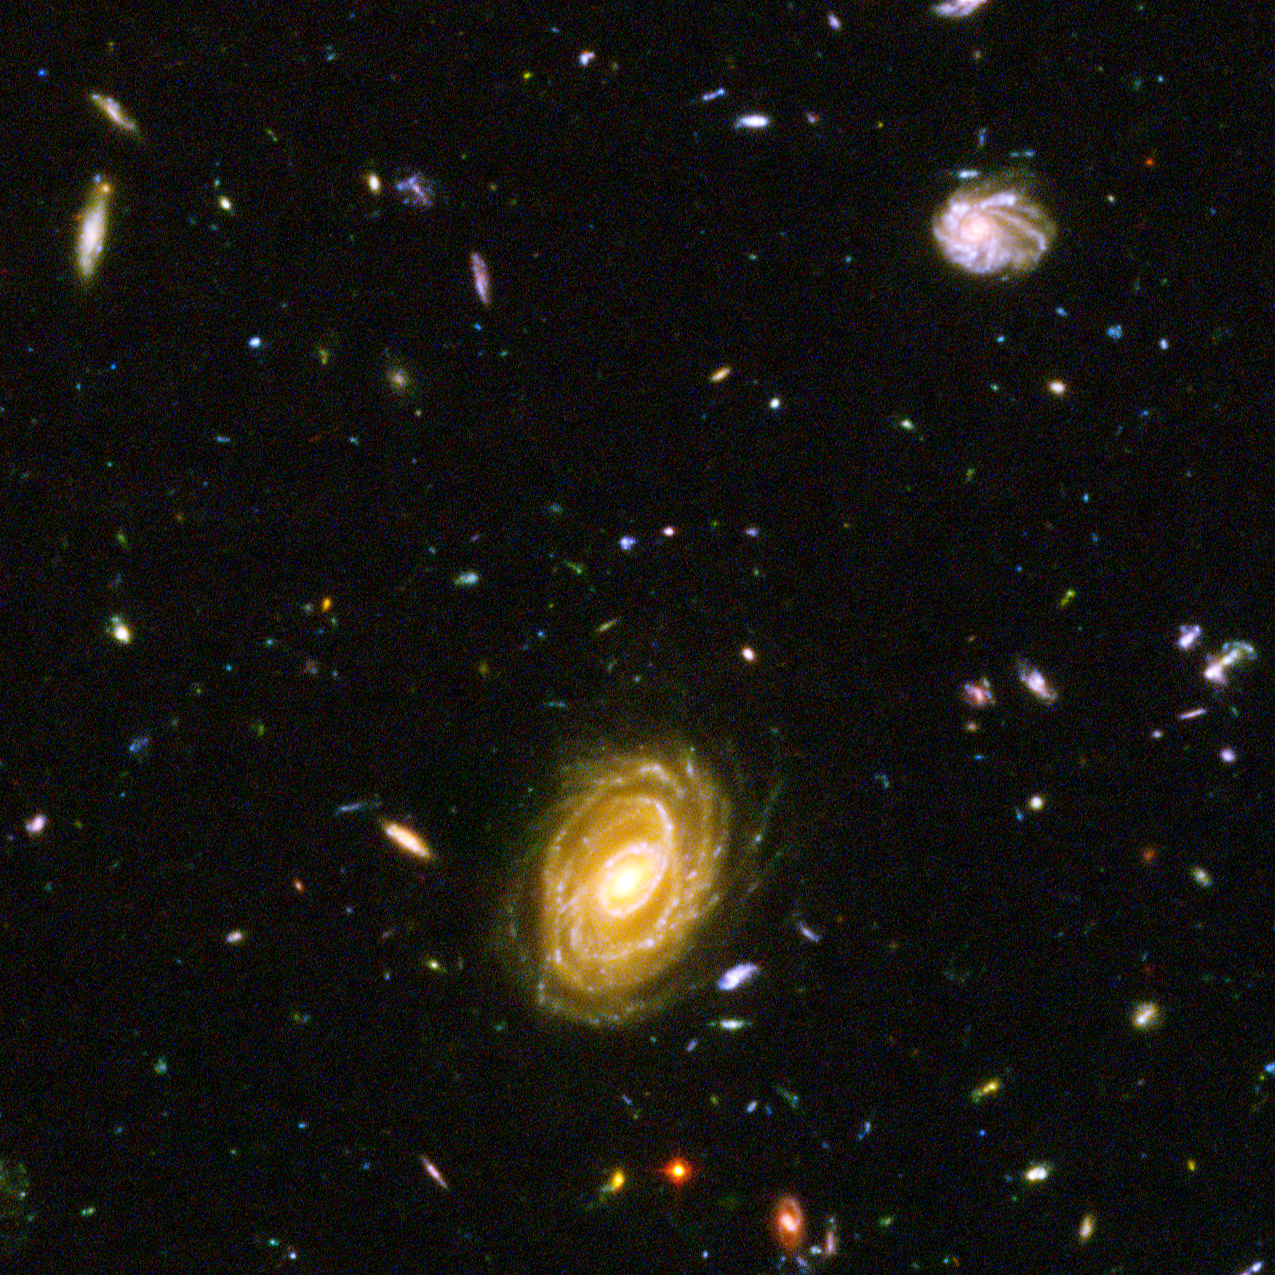

Spitzer and Hubble team up to find "Big Baby" galaxy in the newborn Universe [ACS blow-up]

This image demonstrates how data from two space observatories, the Spitzer and Hubble Space Telescopes, are used to identify one of the most distant galaxies ever seen. This galaxy is unusually massive for its youthful age of 800 million years. (After the Big Bang, the Milky Way by comparison, is approximately 13 billion years old.)

A blow-up of one small area of the HUDF is used to identify where the distant galaxy is located. This indicates that the galaxy's visible light has been absorbed by traveling billions of light-years through intervening hydrogen.

Credit: NASA, ESA, B. Mobasher ( Space Telescope Science Institute and the European Space Agency)